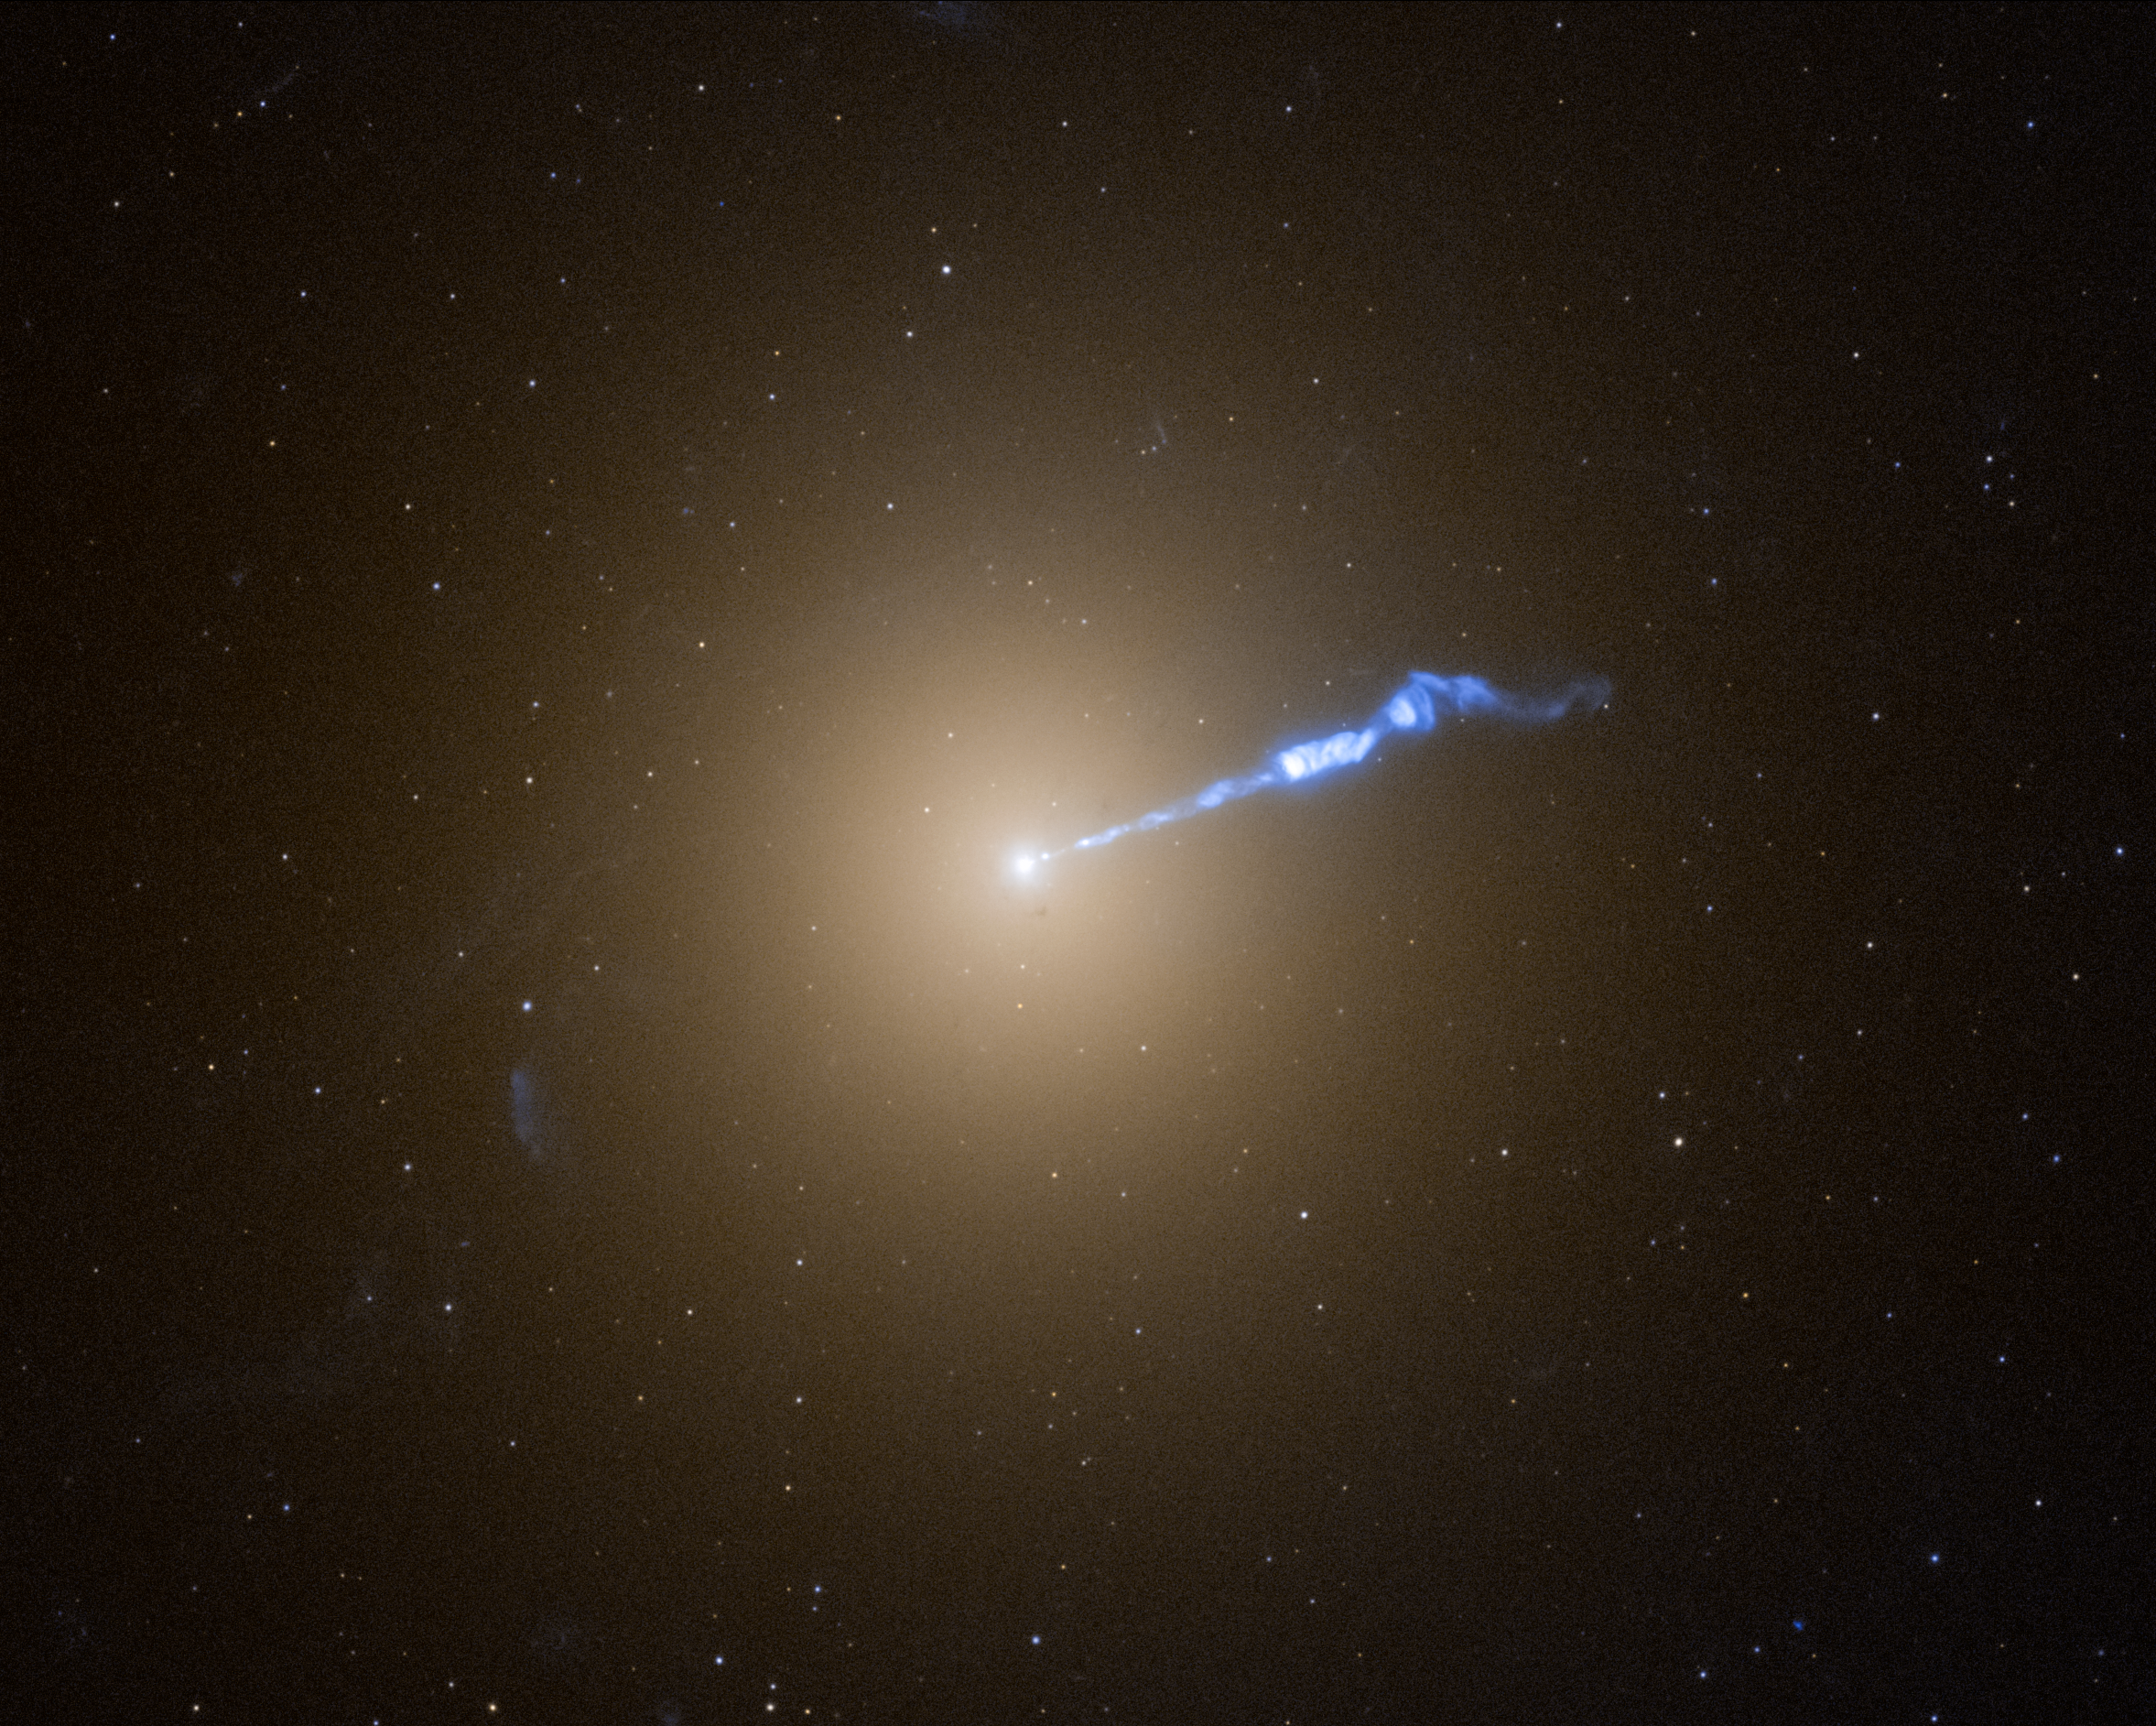

M87

A Hubble Space Telescope image of the giant galaxy M87 shows a 3,000-light-year-long jet of plasma blasting from the galaxy's 6.5-billion-solar-mass central black hole. The blowtorch-like jet seems to cause stars to erupt along its trajectory. These novae are not caught inside the jet, but are apparently in a dangerous neighbourhood nearby. During a recent 9-month survey, astronomers using Hubble found twice as many of these novae going off near the jet as elsewhere in the galaxy. The galaxy is the home of several trillion stars and thousands of star-like globular star clusters.

Credit: NASA, ESA, A. Lessing (Stanford University), E. Baltz (Stanford University), M. Shara (AMNH), J. DePasquale (STScI)